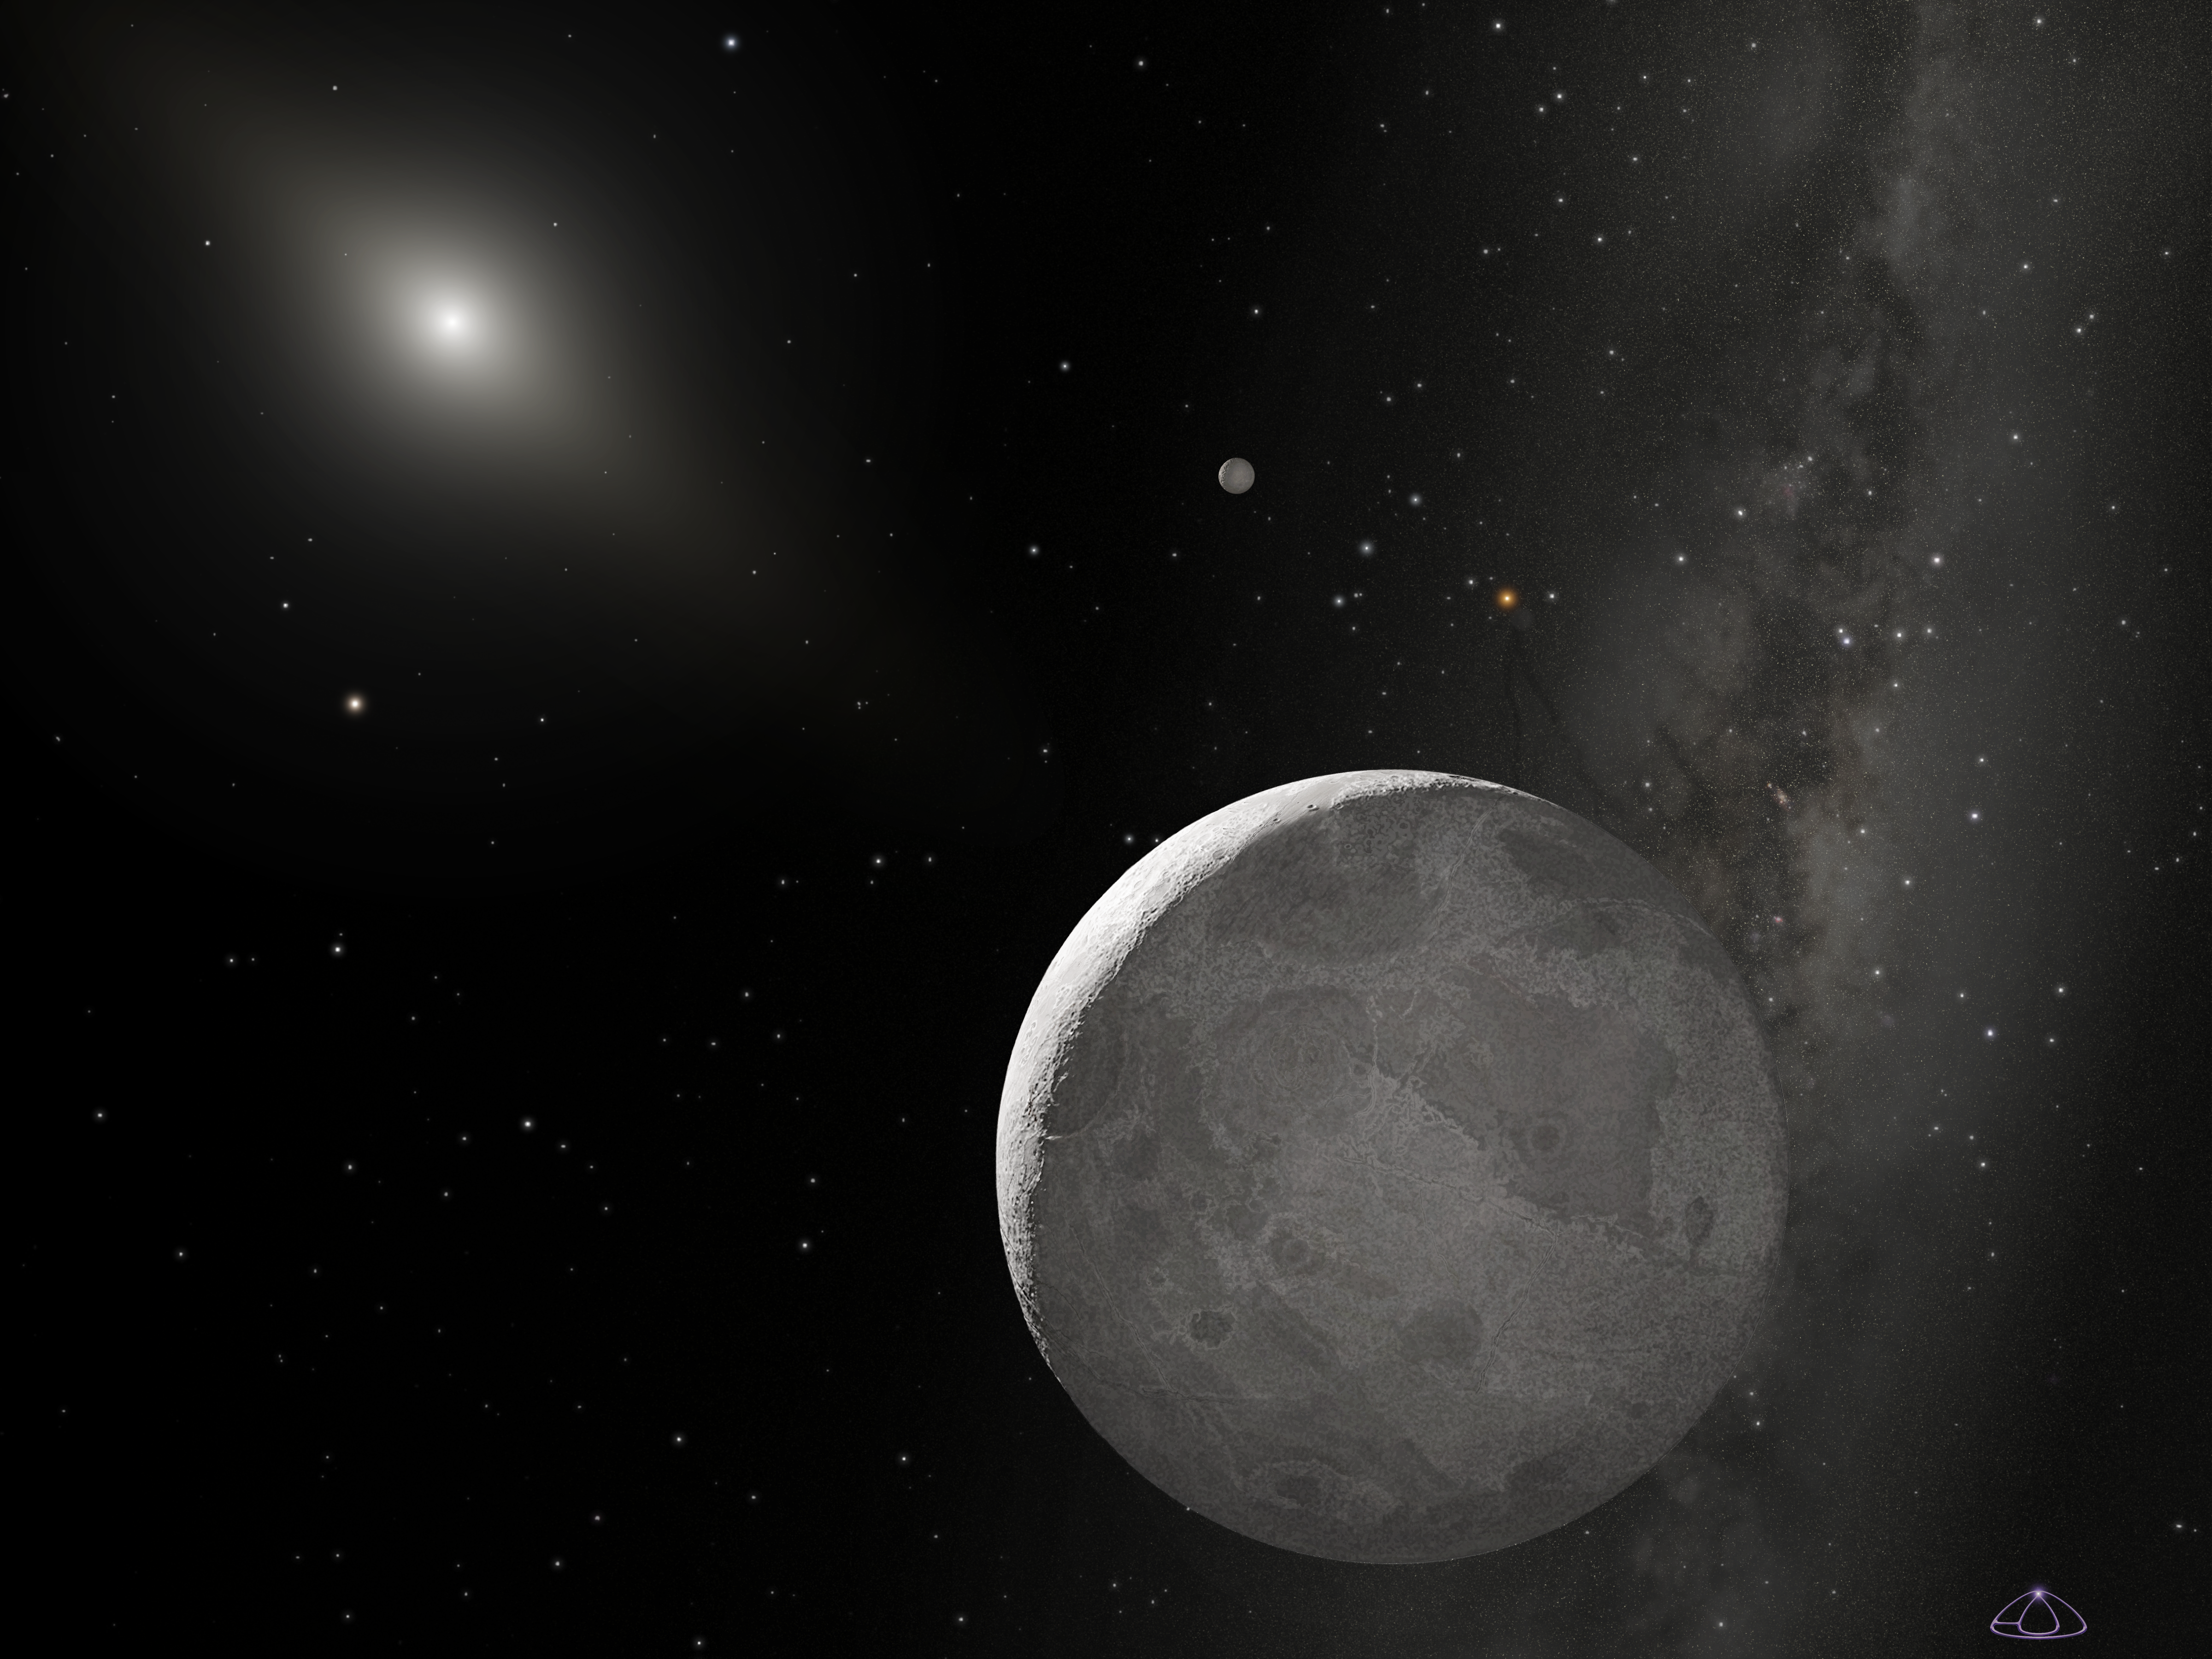

Artist's concept of Kuiper Belt Object 2003 UB313 (non-annotated)

This is an artist's concept of Kuiper Belt object 2003 UB313 (nicknamed Xena) and its satellite Gabrielle.

Ground-based observations suggested that Xena was about 30 percent greater in diameter than Pluto, but Hubble's Advanced Camera for Surveys images, taken on Dec. 9 and 10, 2005, yielded a diameter of 1,490 miles with an uncertainty of 60 miles (about 2400 kilometres with an uncertainty of 100 kilometres) for Xena. Pluto's diameter, as measured by Hubble, is 1,422 miles.

Credit: NASA, ESA, and A. Schaller (for STScI)